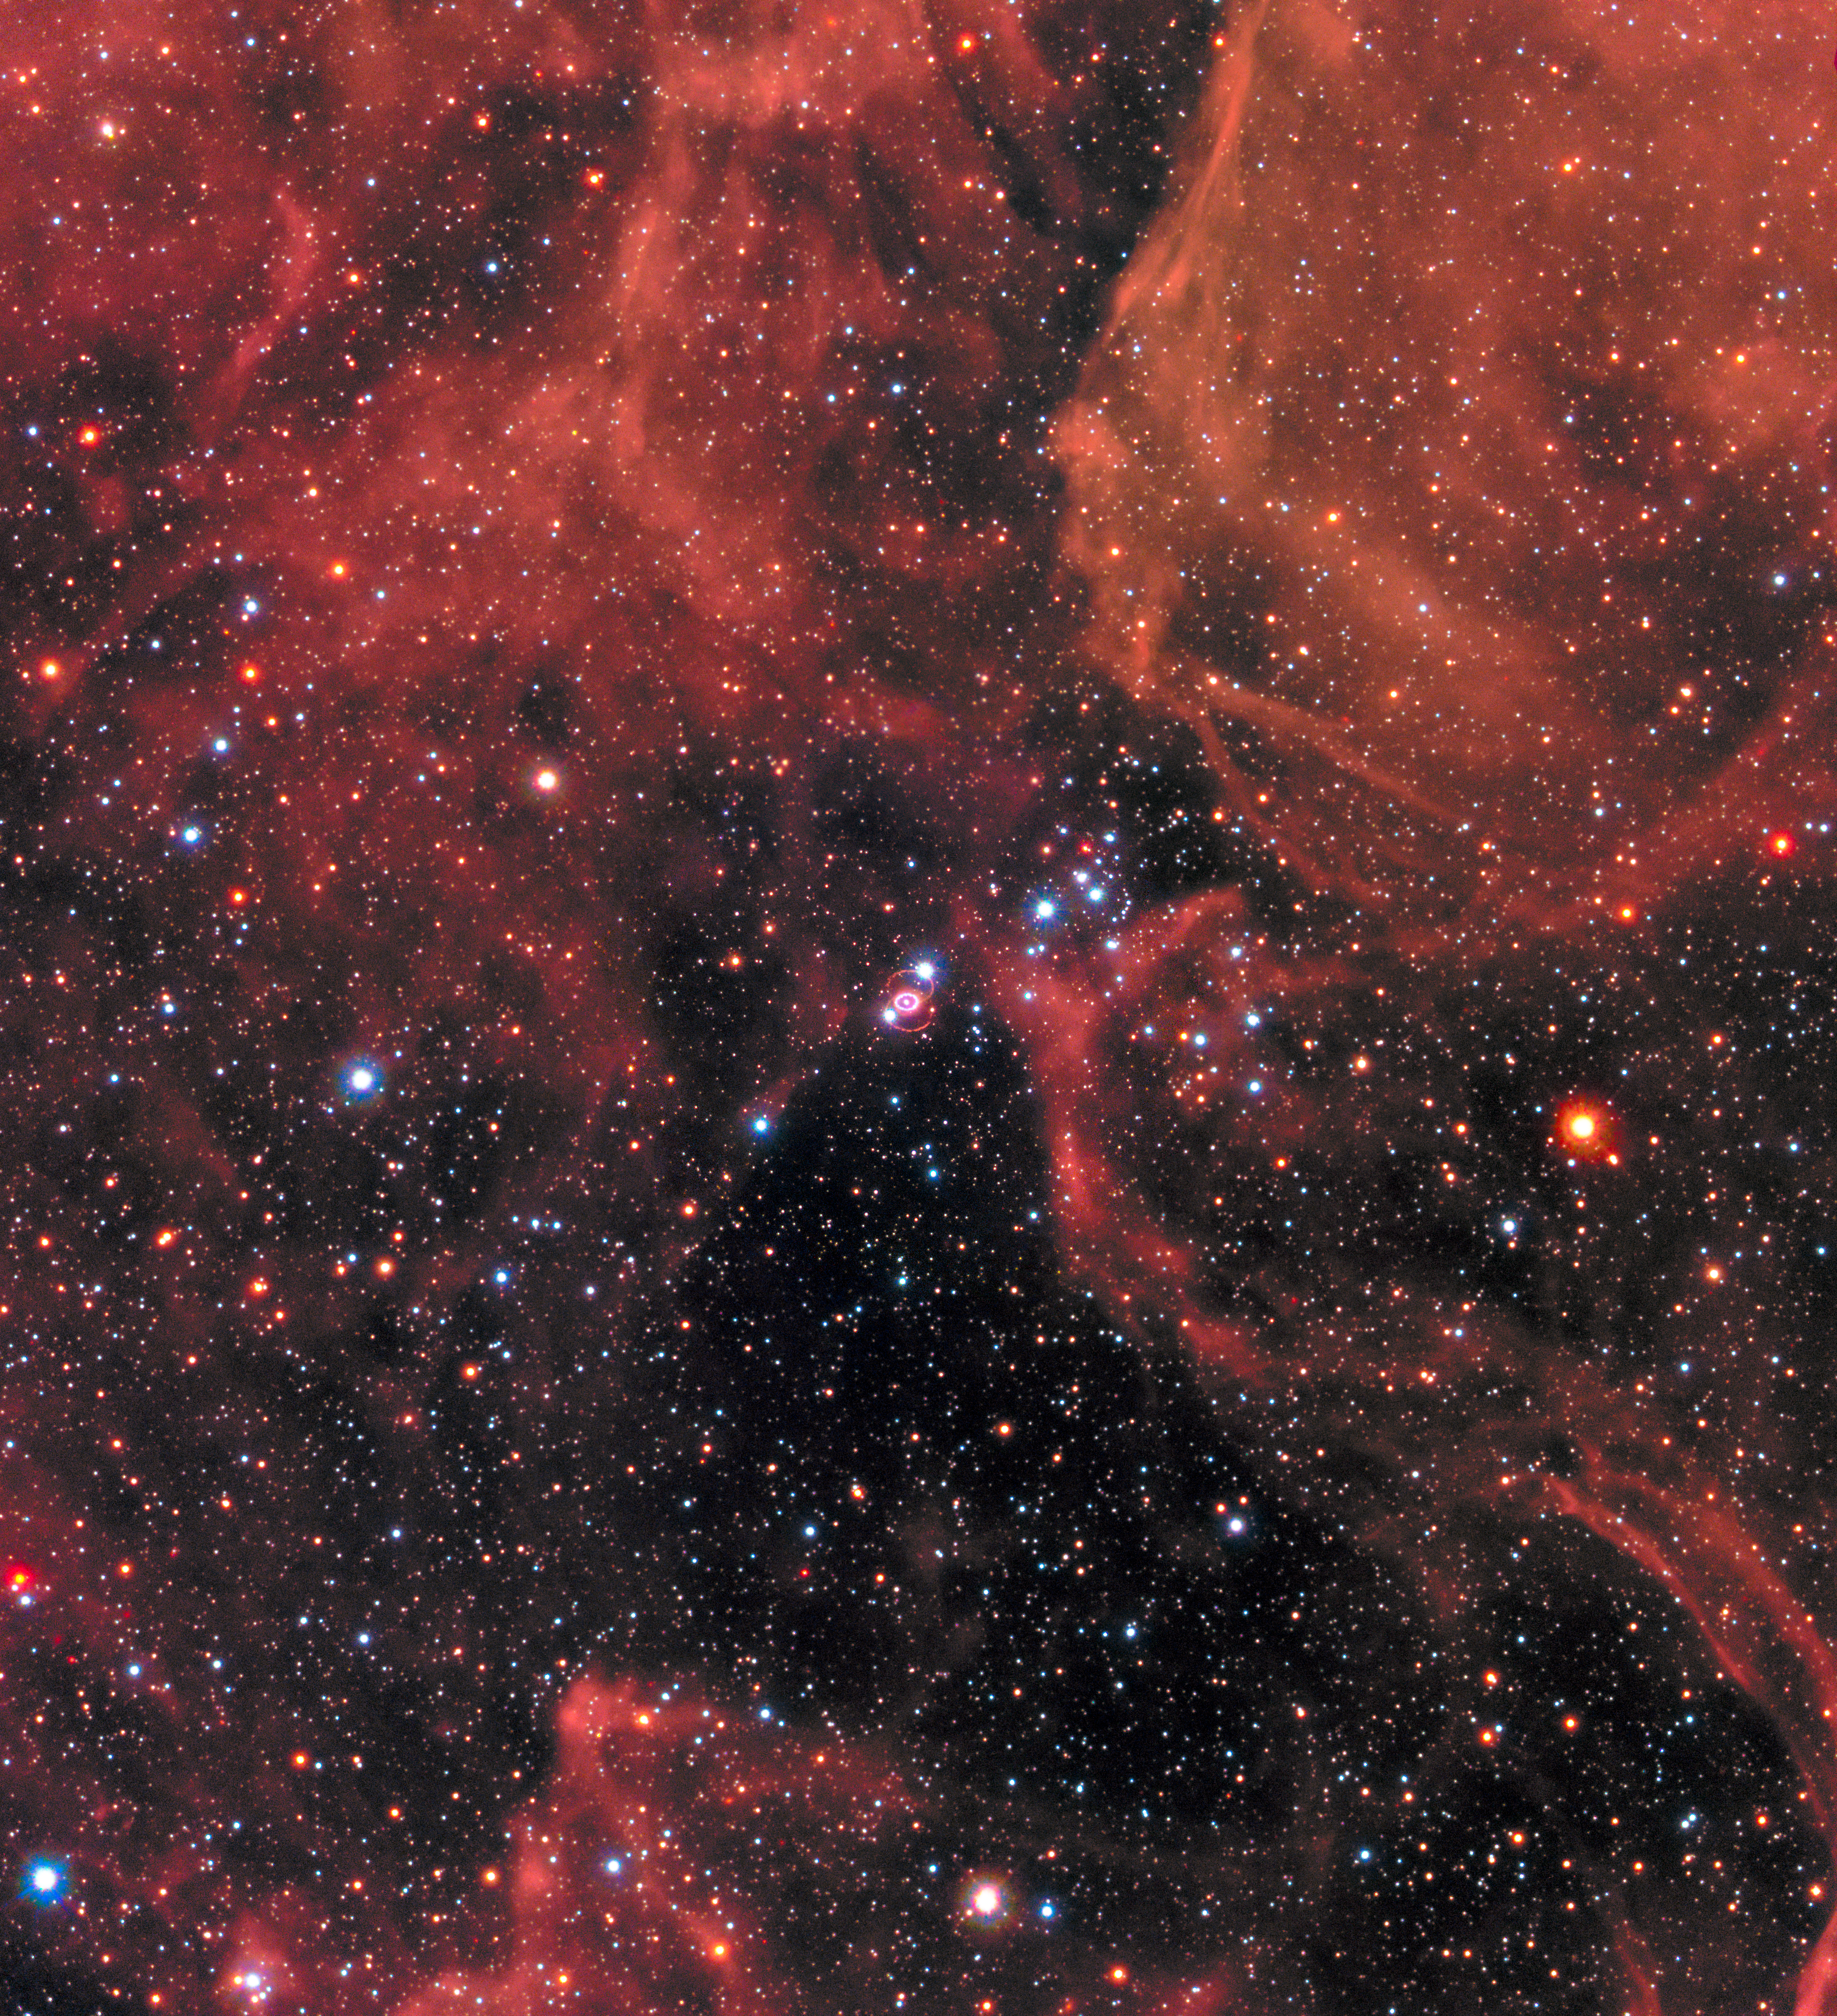

New image of SN 1987A

This new image of the supernova remnant SN 1987A was taken by the NASA/ESA Hubble Space Telescope in January 2017 using its Wide Field Camera 3 (WFC3). Since its launch in 1990 Hubble has observed the expanding dust cloud of SN 1987A several times and this way helped astronomers to create a better understanding of these cosmic explosions.

Supernova 1987A is located in the centre of the image amidst a backdrop of stars. The bright ring around the central region of the exploded star is composed of material ejected by the star about 20 000 years before the actual explosion took place. The supernova is surrounded by gaseous clouds. The clouds’ red colour represents the glow of hydrogen gas.

The colours of the foreground and background stars were added from observations taken by Hubble’s Wide Field Planetary Camera 2 (WFPC2).

Credit: NASA, ESA, and R. Kirshner (Harvard-Smithsonian Center for Astrophysics and Gordon and Betty Moore Foundation) and P. Challis (Harvard-Smithsonian Center for Astrophysics)